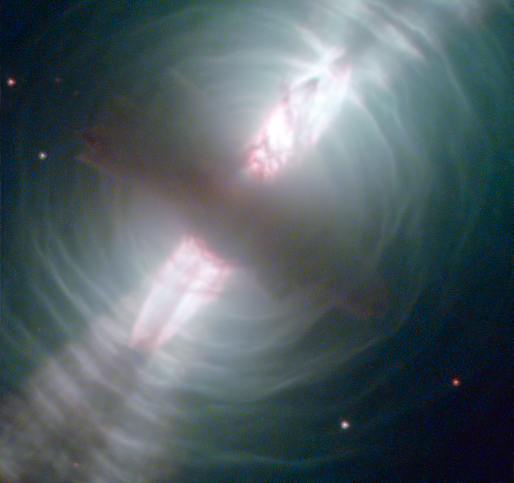

Hubble images searchlight beams from a preplanetary nebula

The NASA/ESA Hubble Space Telescope has been at the cutting edge of research into what happens to stars like our Sun at the ends of their lives (see for example Hubblecast 51). One stage that stars pass through as they run out of nuclear fuel is the preplanetary, or protoplanetary nebula. This Hubble image of the Egg Nebula shows one of the best views to date of this brief but dramatic phase in a star’s life.

The preplanetary nebula phase is a short period in the cycle of stellar evolution — over a few thousand years, the hot remains of the star in the centre of the nebula heat it up, excite the gas, and make it glow as a planetary nebula. The short lifespan of preplanetary nebulae means there are relatively few of them in existence at any one time. Moreover, they are very dim, requiring powerful telescopes to be seen. This combination of rarity and faintness means they were only discovered comparatively recently. The Egg Nebula, the first to be discovered, was first spotted less than 40 years ago, and many aspects of this class of object remain shrouded in mystery.

At the centre of this image, and hidden in a thick cloud of dust, is the nebula’s central star. While we can’t see the star directly, four searchlight beams of light coming from it shine out through the nebula. It is thought that ring-shaped holes in the thick cocoon of dust, carved by jets coming from the star, let the beams of light emerge through the otherwise opaque cloud. The precise mechanism by which stellar jets produce these holes is not known for certain, but one possible explanation is that a binary star system, rather than a single star, exists at the centre of the nebula.

The onion-like layered structure of the more diffuse cloud surrounding the central cocoon is caused by periodic bursts of material being ejected from the dying star. The bursts typically occur every few hundred years.

The distance to the Egg Nebula is only known very approximately, the best guess placing it at around 3000 light-years from Earth. This in turn means that astronomers do not have any accurate figures for the size of the nebula (it may be larger and further away, or smaller but nearer).

This image is produced from exposures in visible and infrared light from Hubble’s Wide Field Camera 3.

Credit: ESA/Hubble & NASA